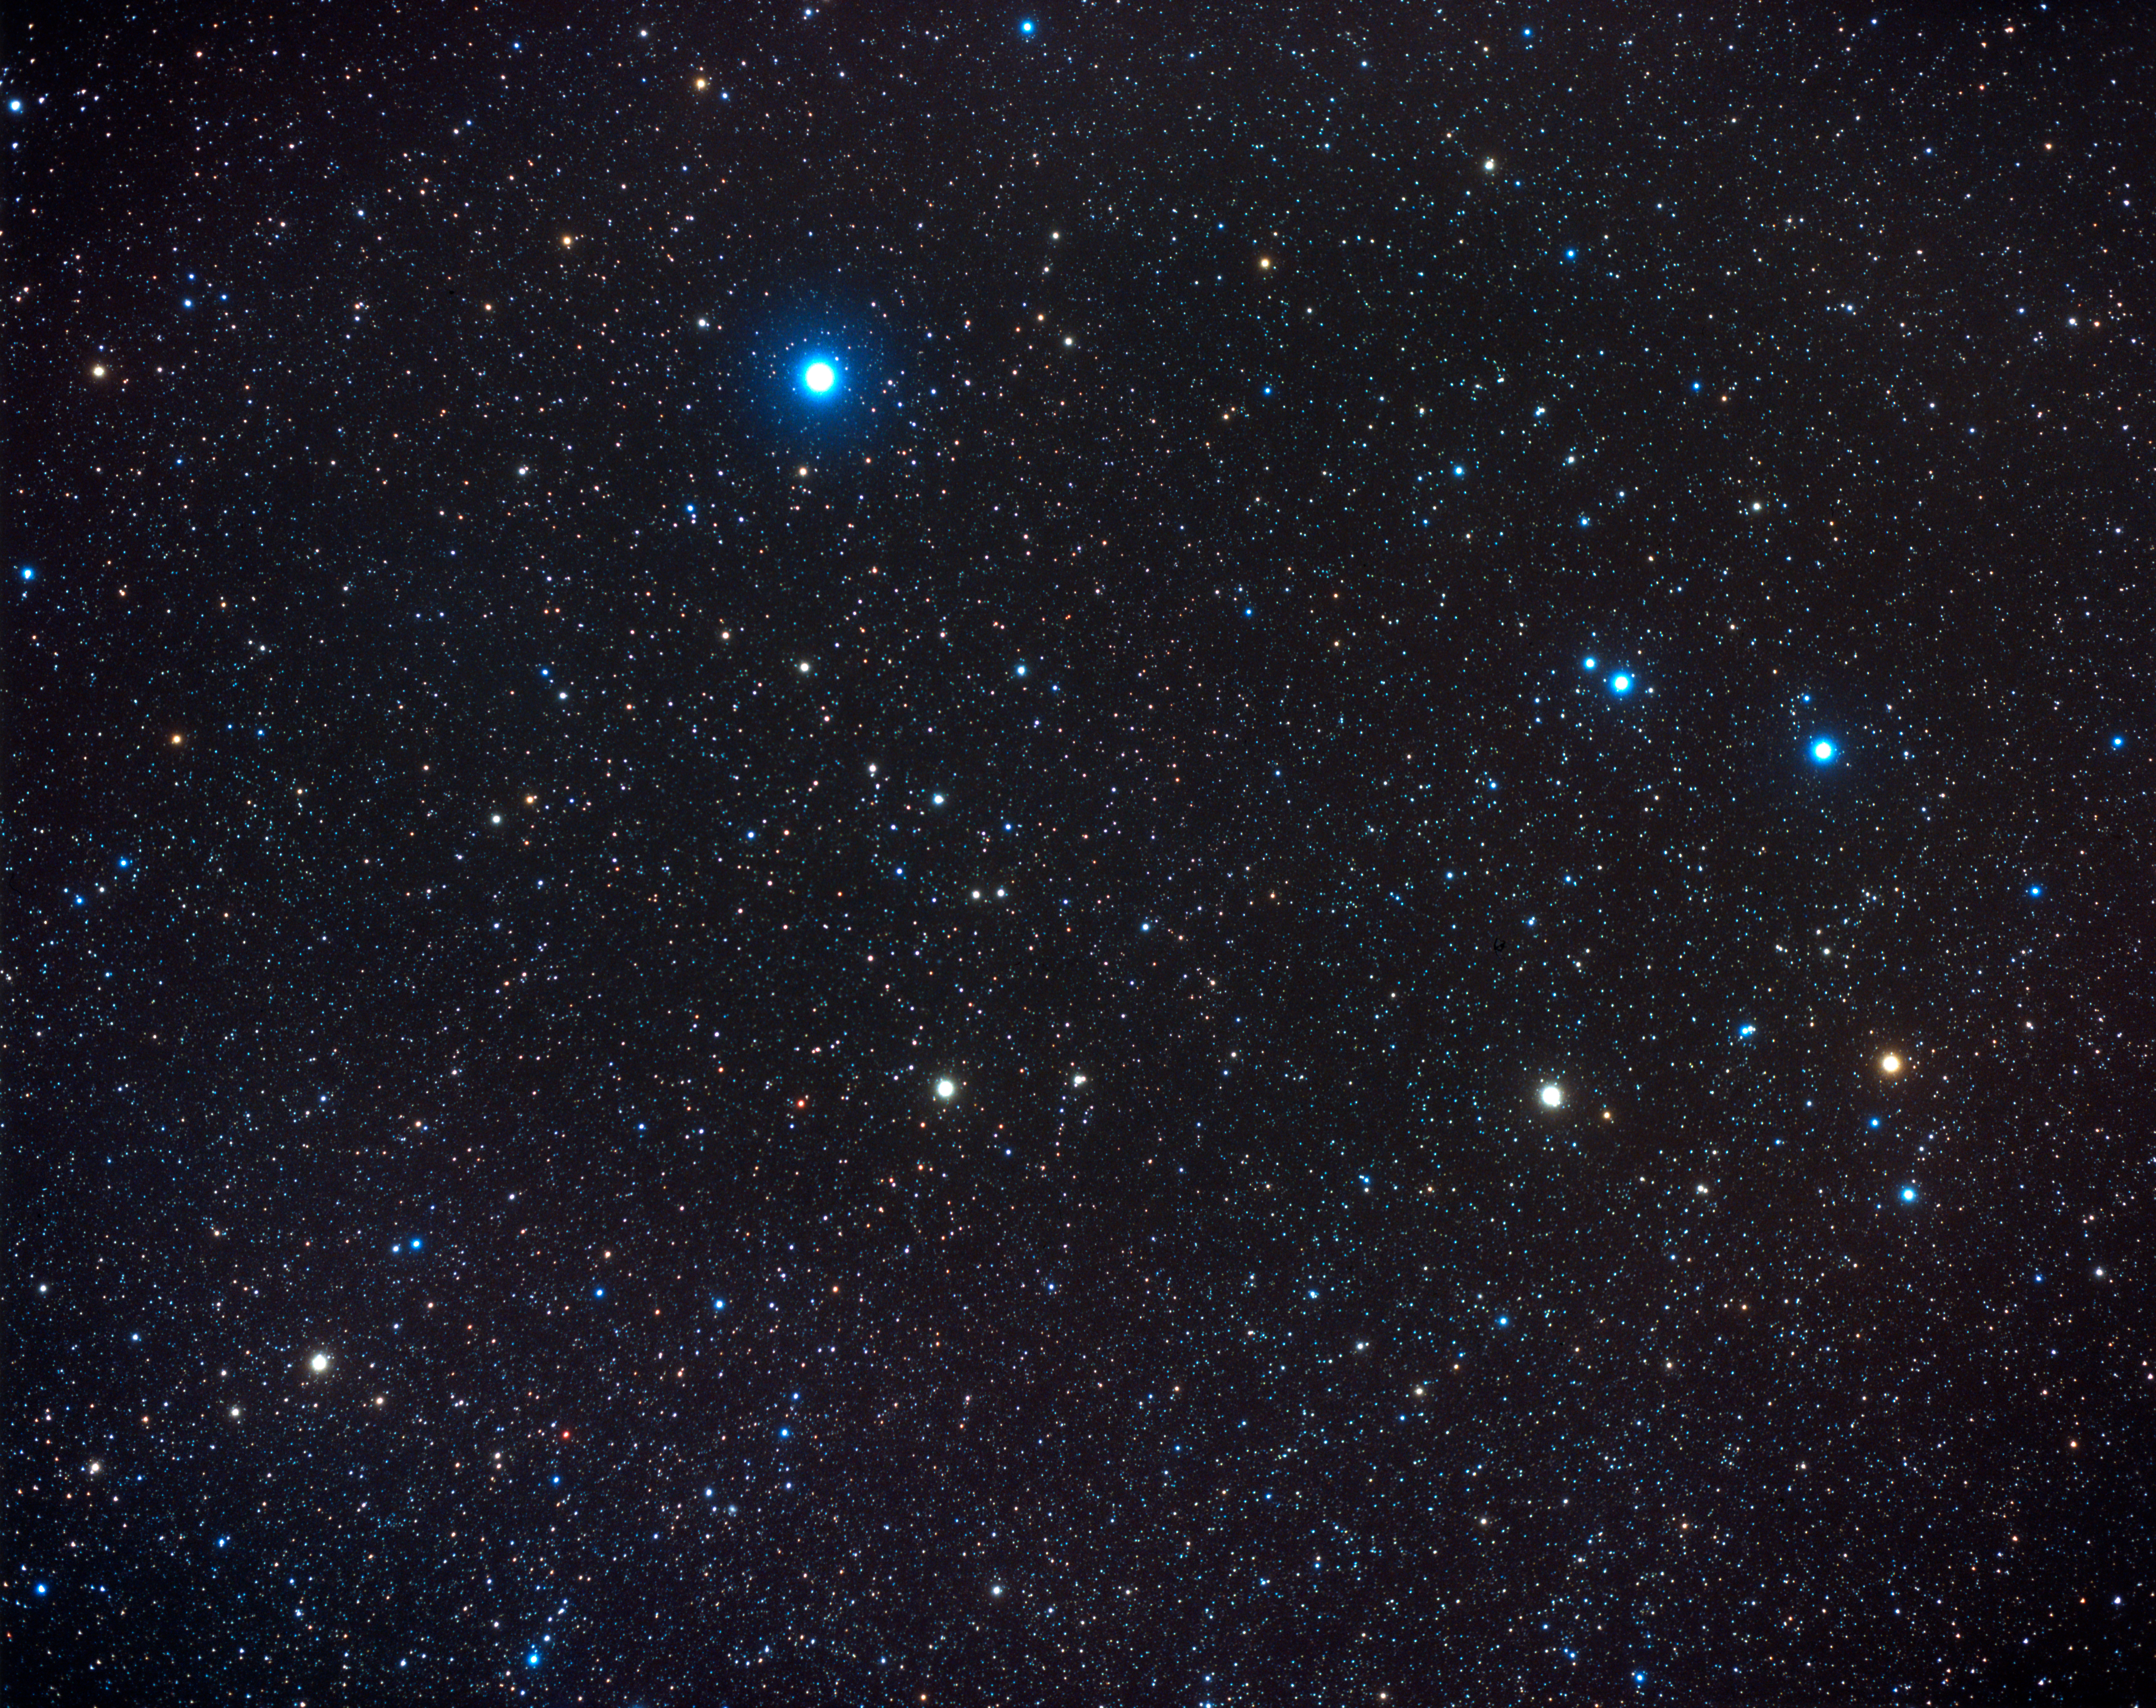

Constellation Corvus (ground-based image)

This ground-based photo shows a wide angle view of the constellation Corvus and part of contellation Hydra. The Antennae galaxies is located in the southern constellation of Corvus.

Credit: NASA, ESA, Z. Levay (STScI) and A. Fujii